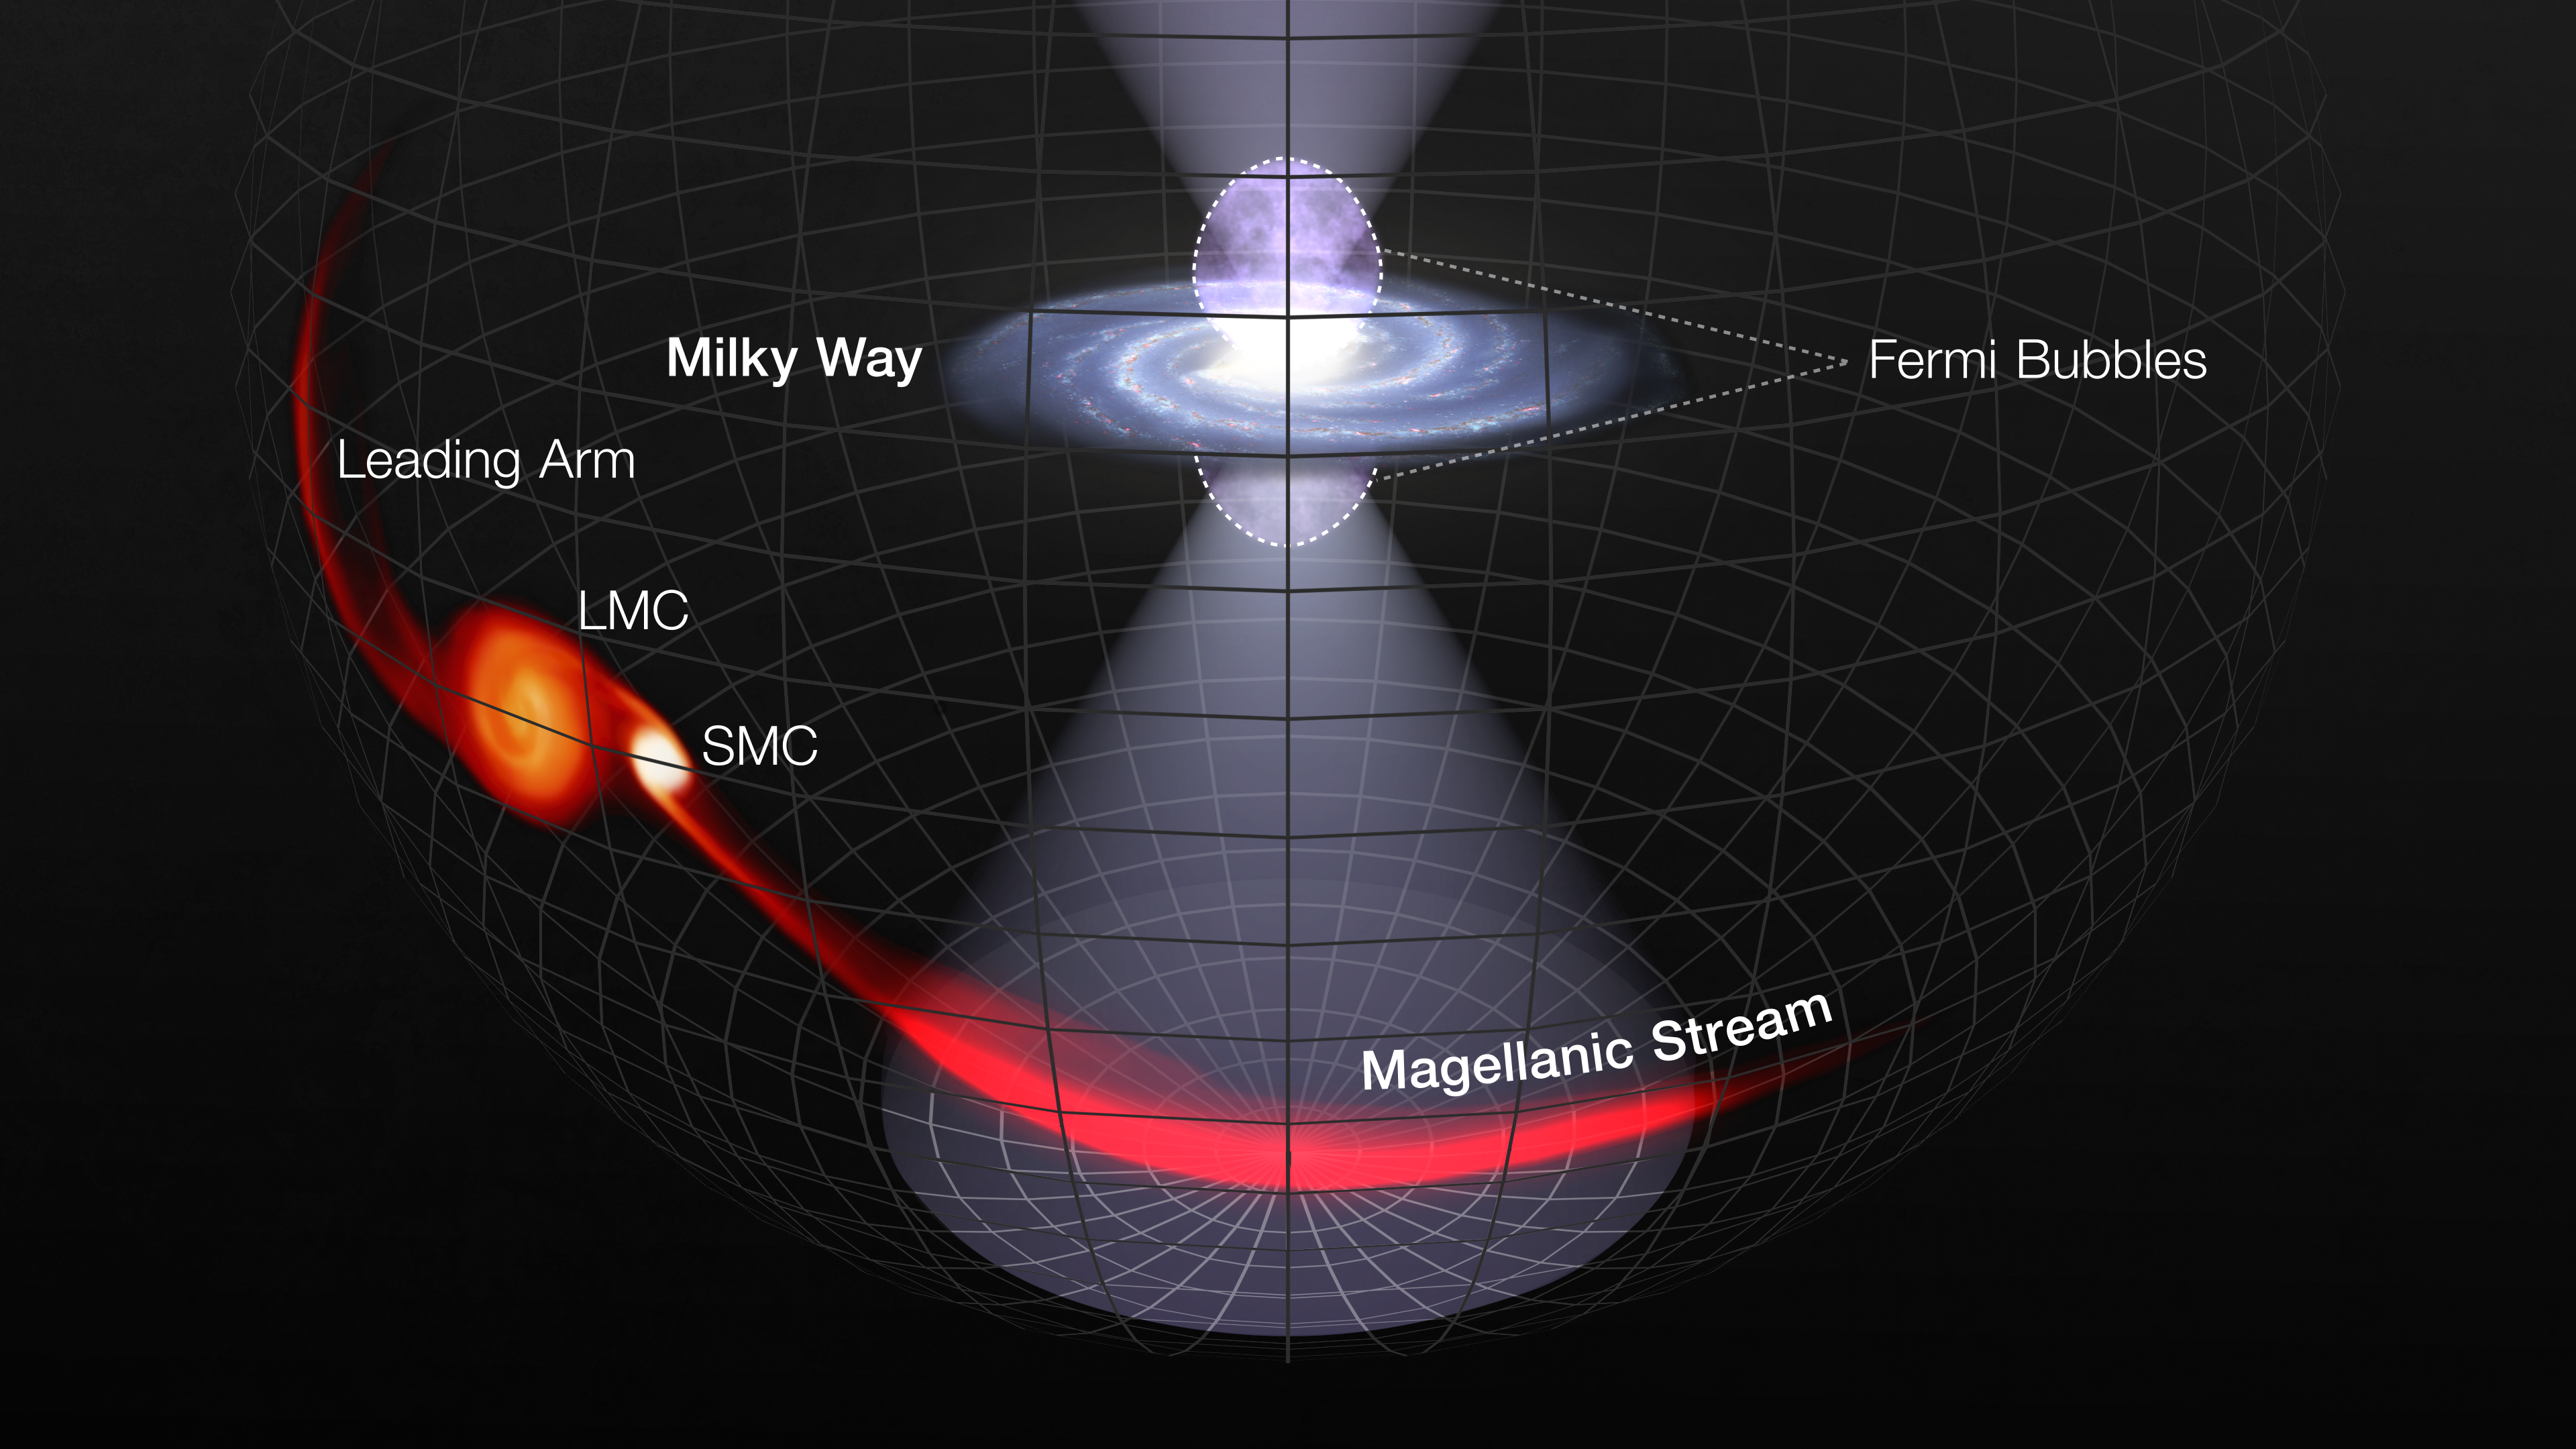

Hubble Records Brilliant Flash from the Milky Way’s Black Hole

Results from the NASA/ESA Hubble Space Telescope have found that an intense flash from the Milky Way’s black hole illuminated gas far outside of our galaxy approximately 3.5 million years ago.

This flash is believed to have illuminated a huge, ribbon-like tail of gas orbiting the Milky Way. Called the Magellanic Stream, this long trail lies far outside of our galaxy, at an average distance of 200,000 light-years. Like an aircraft contrail, it extends from neighboring dwarf galaxies called the Large and Small Magellanic Clouds. Researchers made careful ultraviolet measurements of distant quasars behind the Magellanic Stream. As the ultraviolet light from the quasars passed through the stream, Hubble recorded the telltale fingerprints of how the flash altered the gas.

Credit: NASA, ESA, and L. Hustak (STScI)